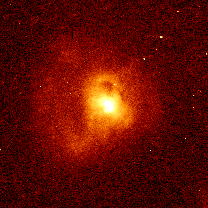

Quasar IRAS 13218+0552

Hubble has captured evidence of a dance between two merging galaxies. The galaxies may have orbited each other several times before merging, leaving distinct loops of glowing gas around quasar IRAS13218+0552. The quasar is 2 billion light-years from Earth. The elongated core in the center of the image may comprise the two nuclei of the merging galaxies.

Credit: John Bahcall (Institute for Advanced Study, Princeton) Mike Disney (University of Wales) and NASA/ESA